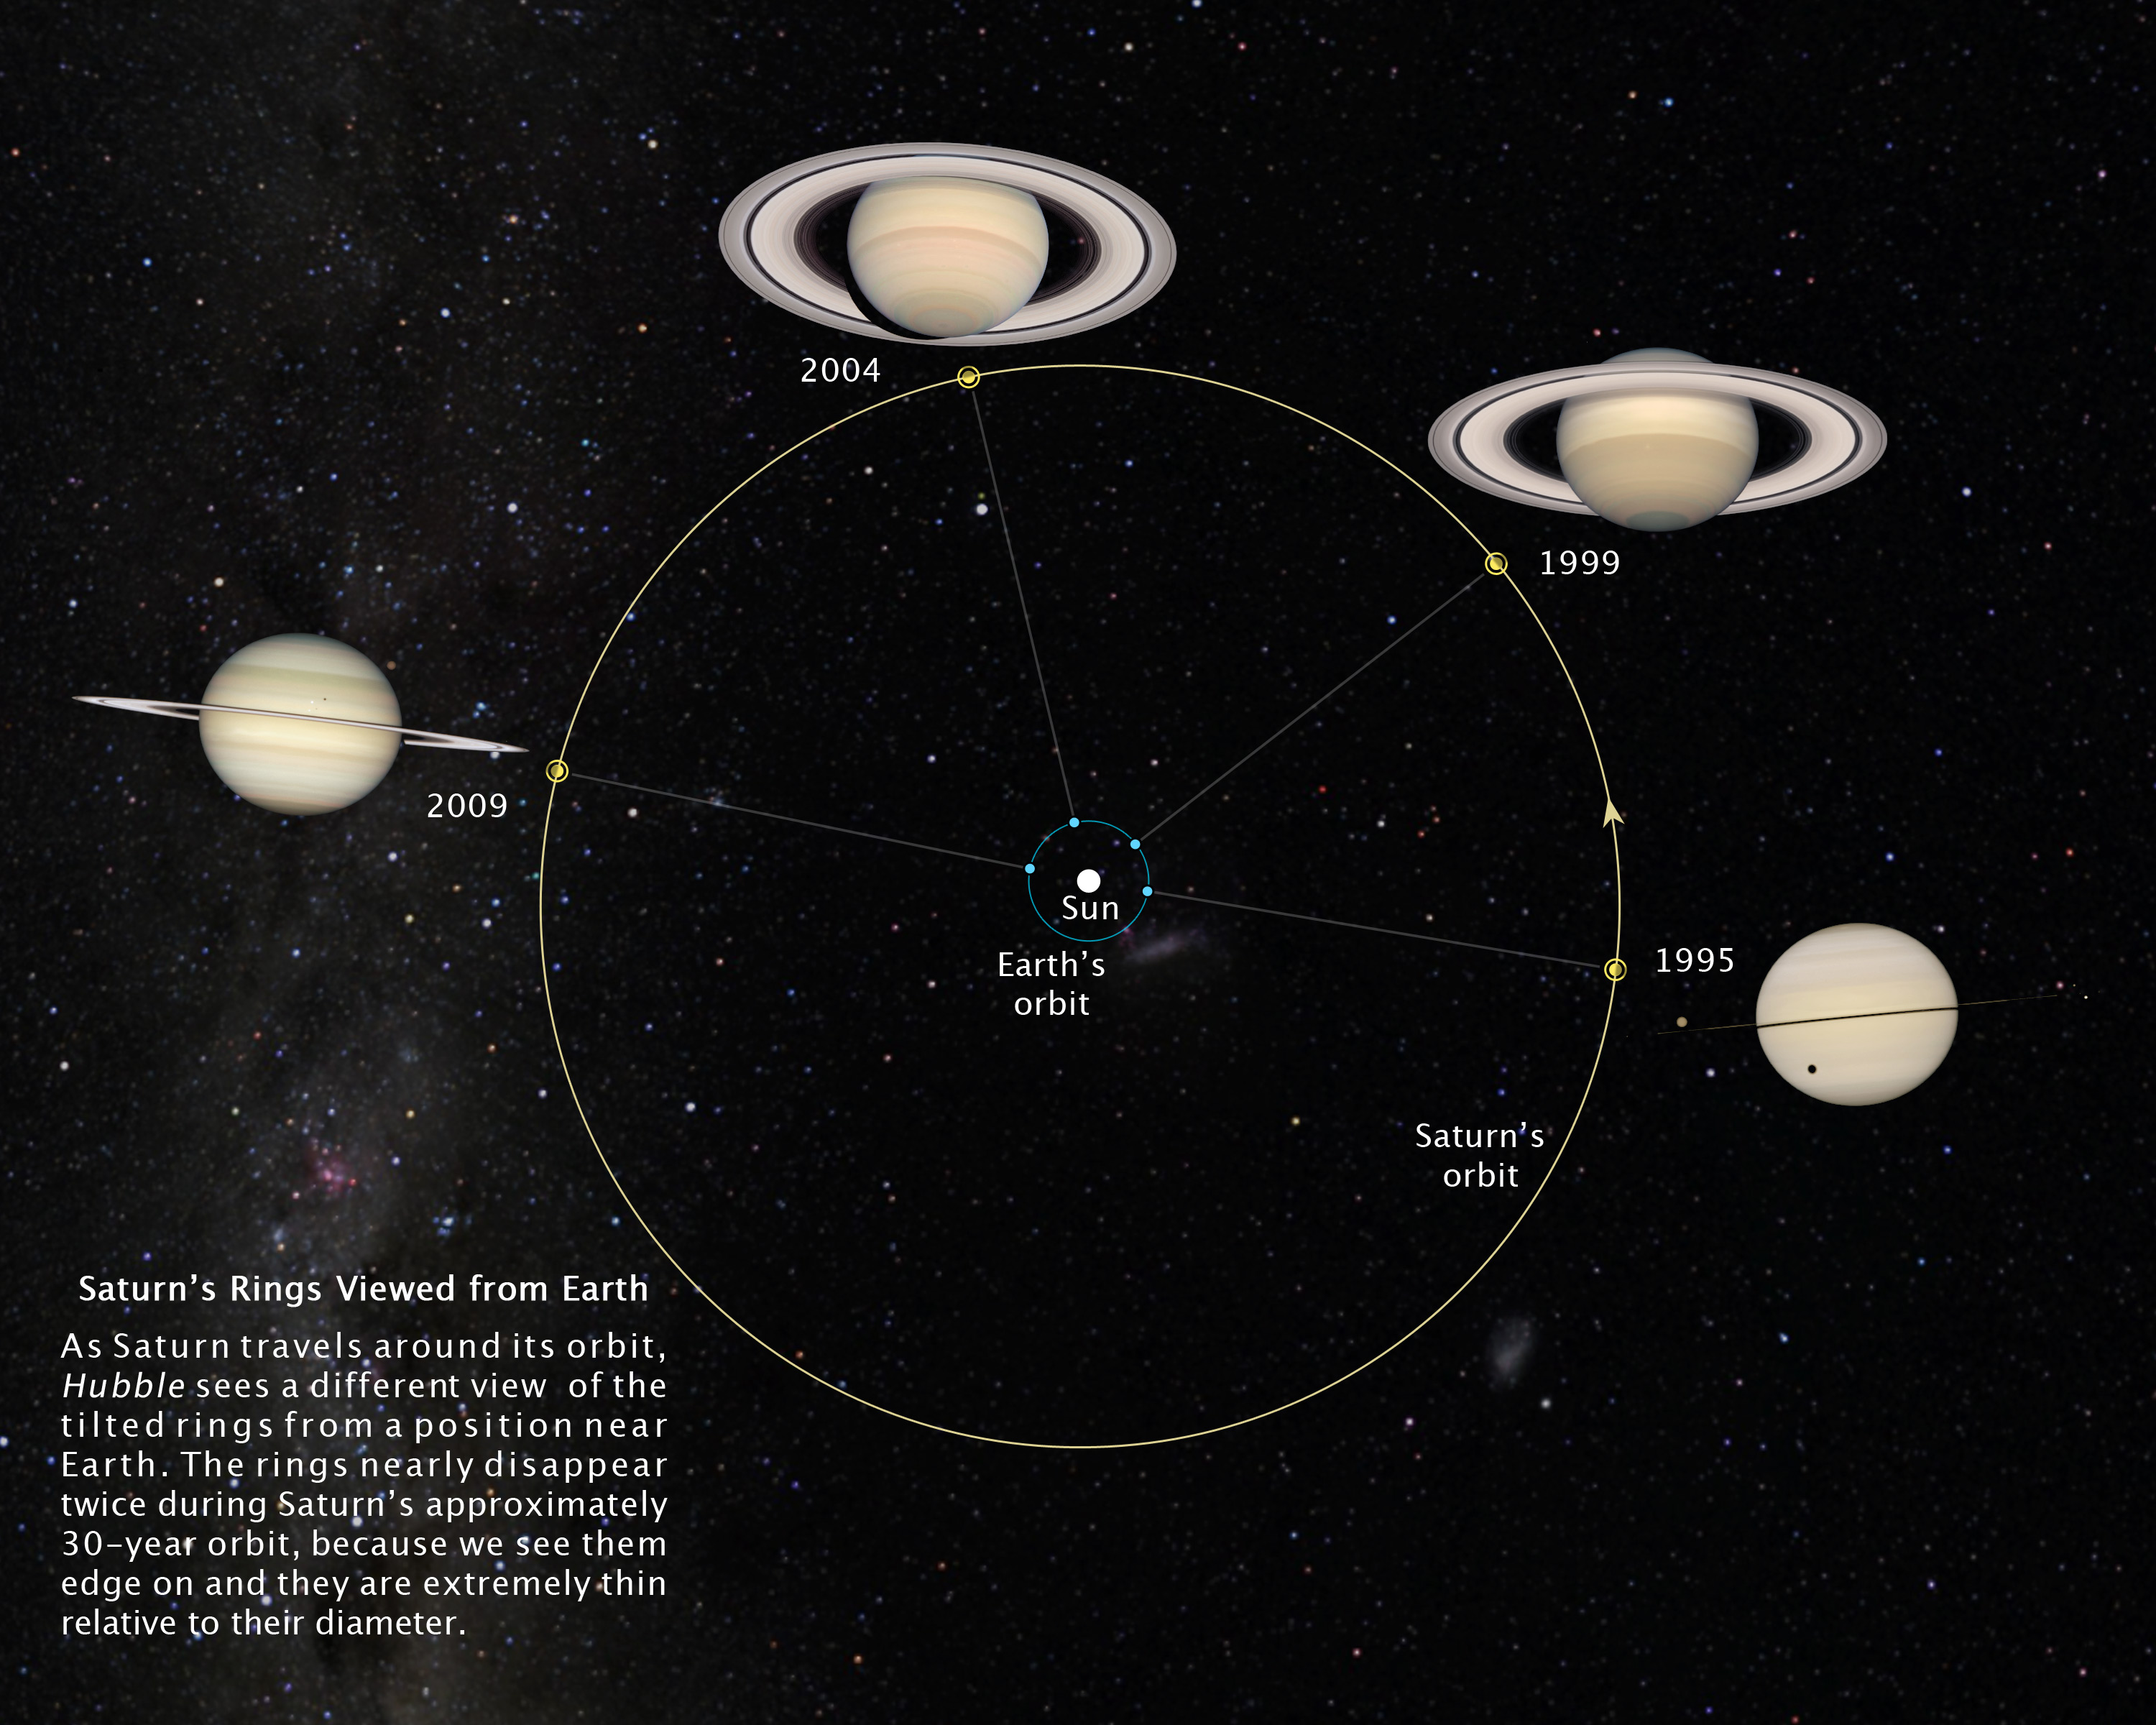

Saturn's rings viewed from Earth

As Saturn travels around its orbit, Hubble sees a different view of the tilted rings from a position near Earth. The rings nearly disappear twice during Saturn's approximately 30-year orbit, because we see them edge on and they are extremely thin relative to their diameter.

Credit: NASA, ESA and Z. Levay (STScI). Photo credit: NASA, ESA and the Hubble Heritage Team (STScI/AURA). Acknowledgment: M. Wong (STScI/UC Berkeley) and C. Go (Philippines)